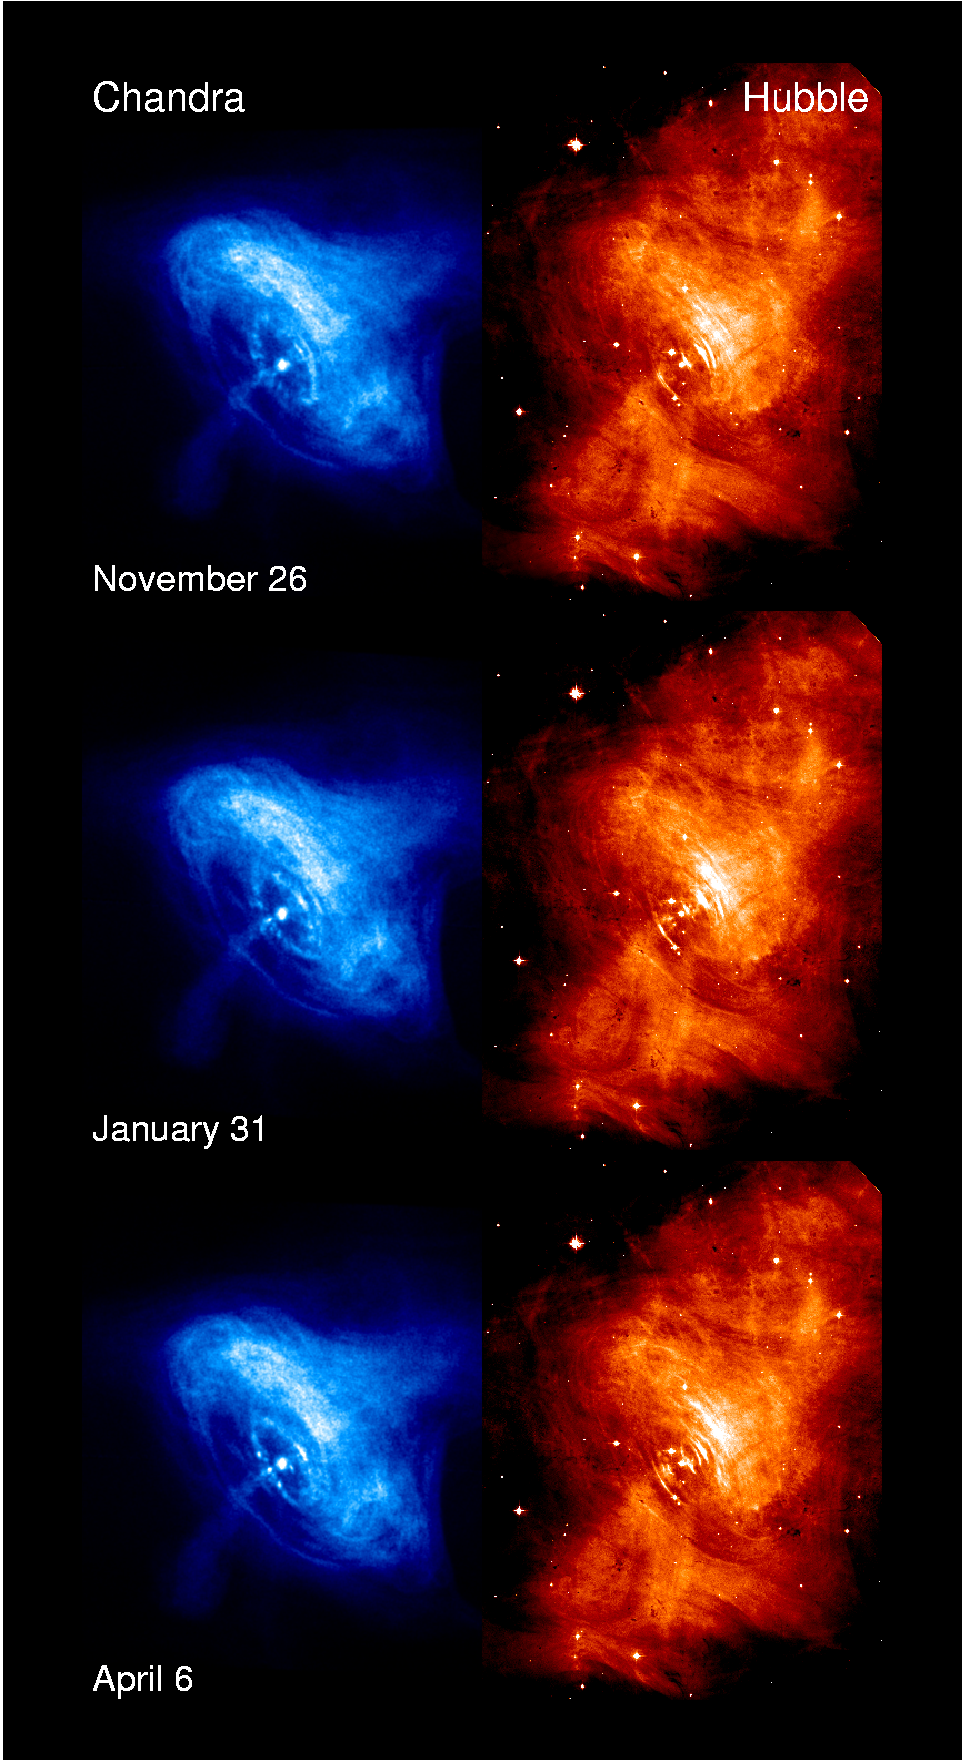

6 panel of Chandra & Hubble, full field

This comparison between the Chandra (left) and Hubble (right) images of the Crab Nebula shows 3 sets of full field views.

Credit: NASA/ESA/CXC/ASU/J. Hester et al., HST/ASU/J. Hester et al.